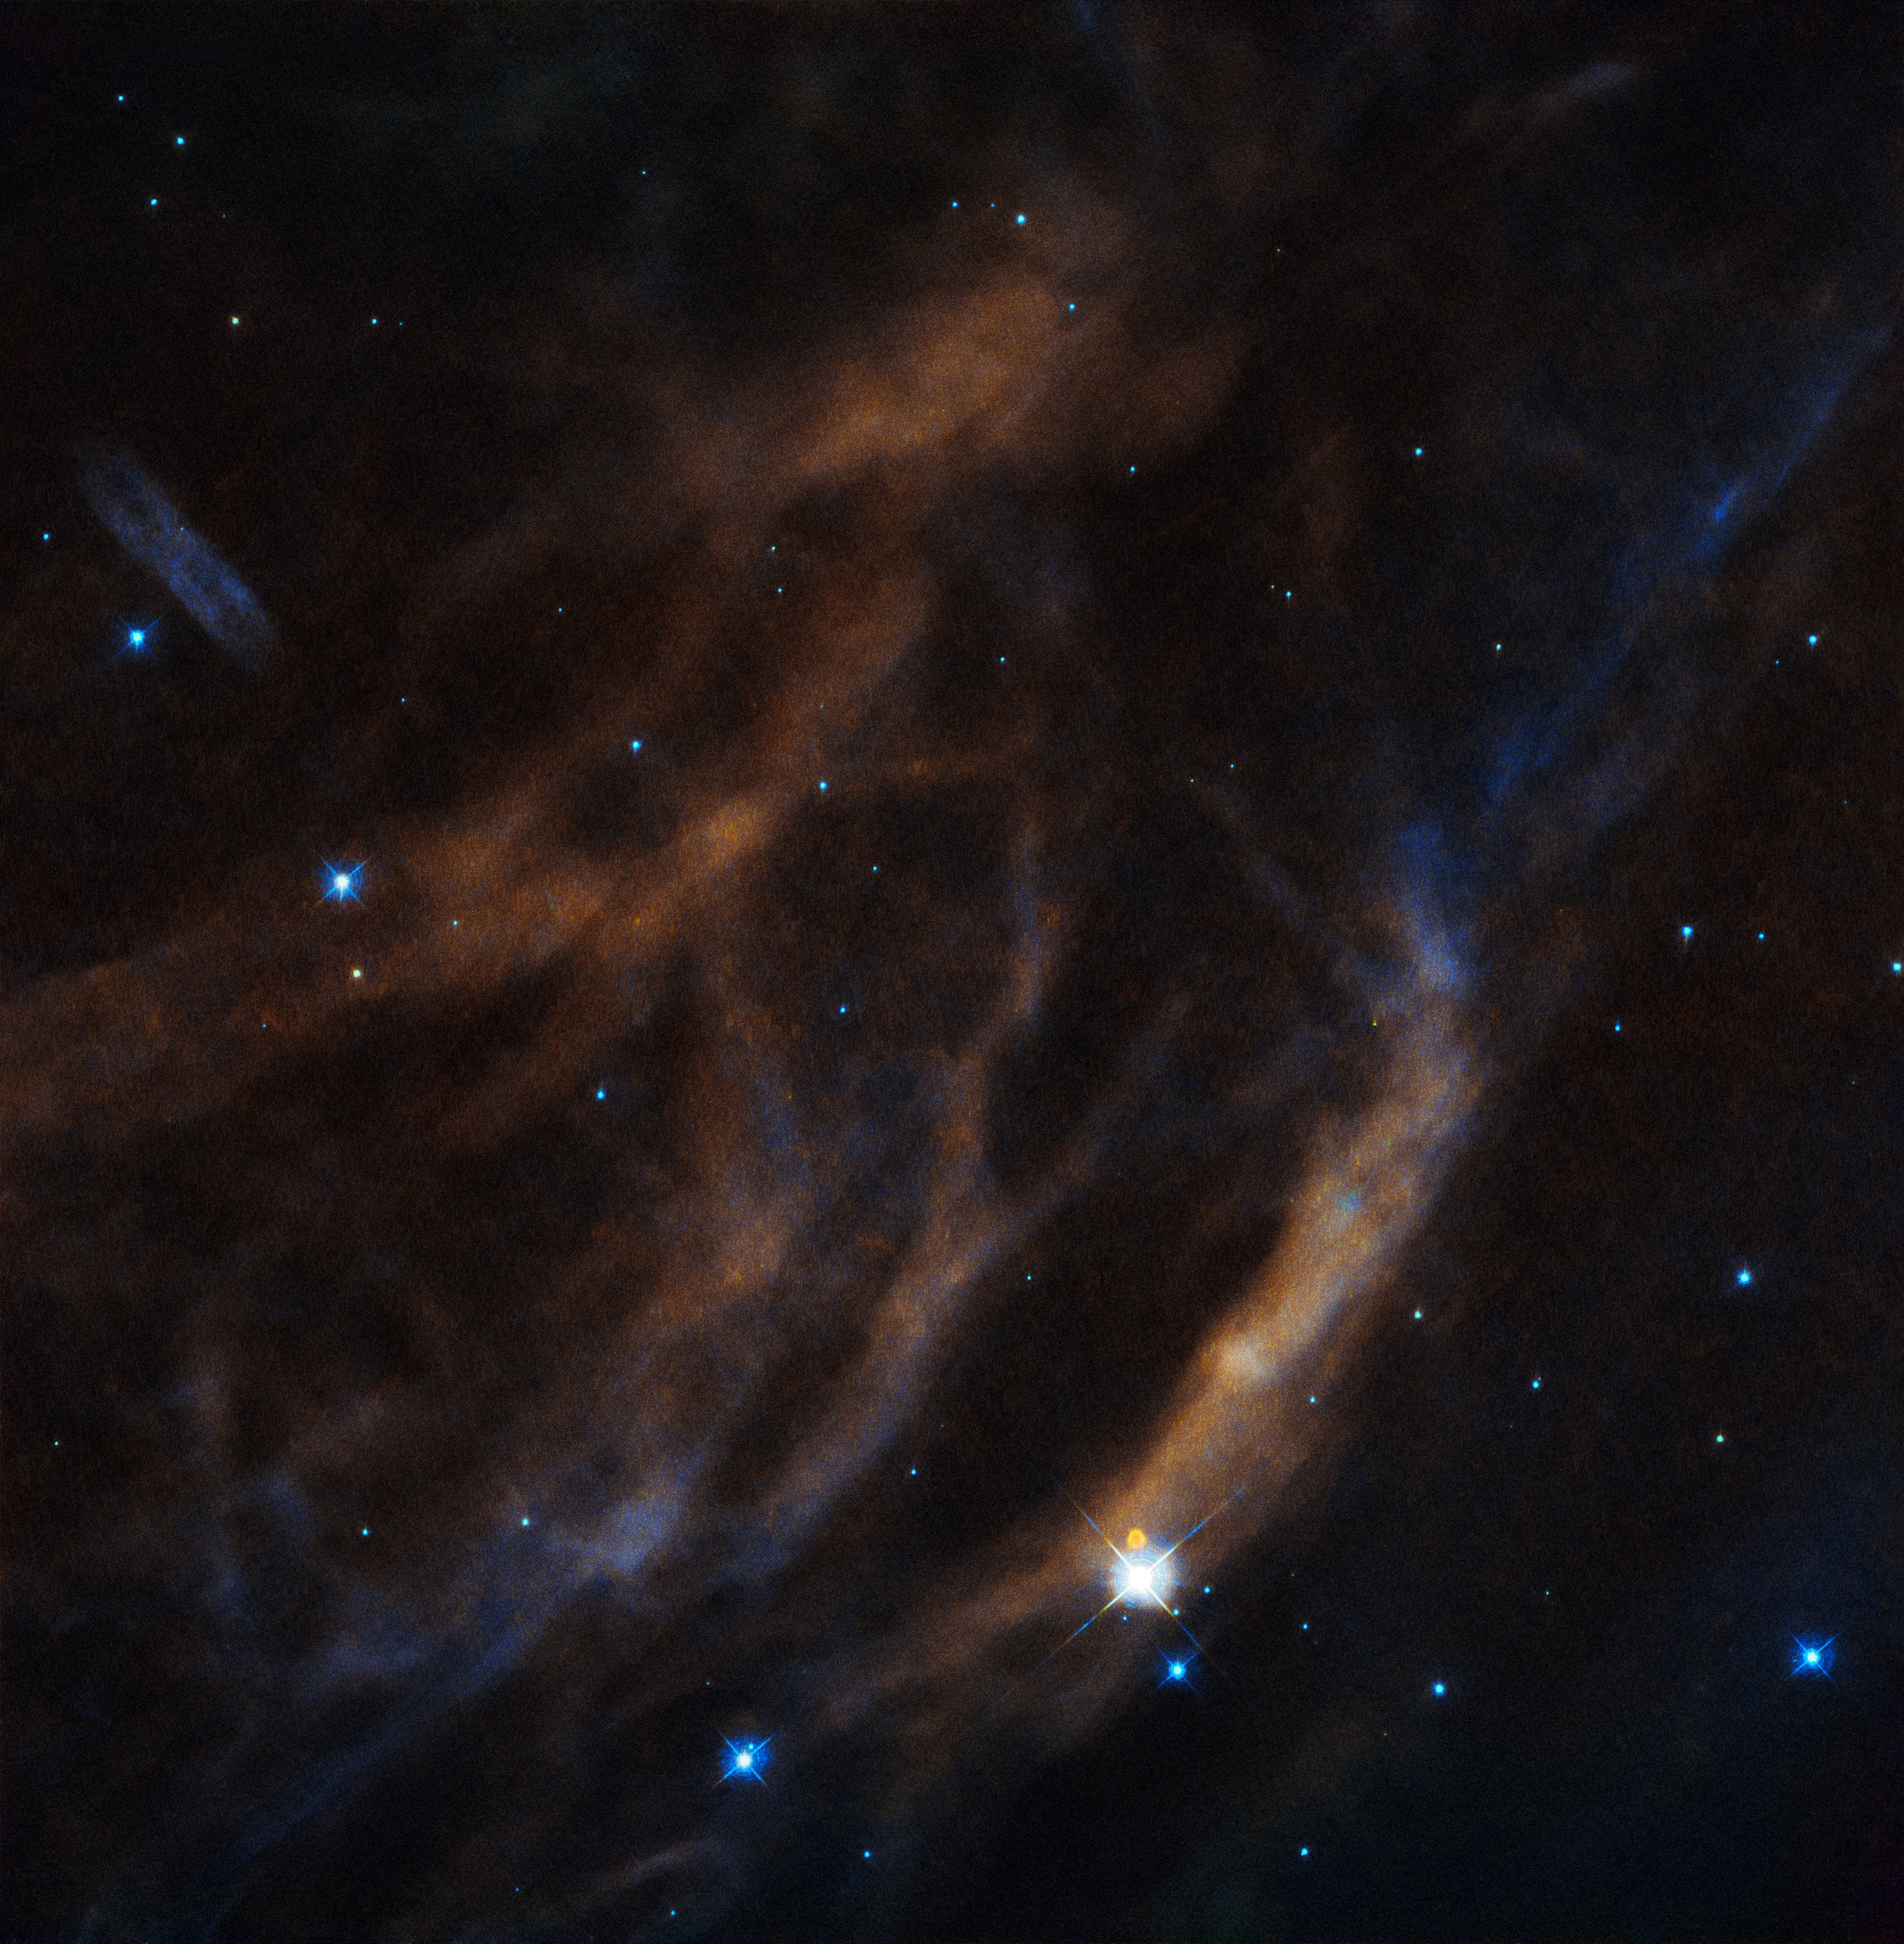

Blowing cosmic bubbles

This entrancing image shows a few of the tenuous threads that comprise Sh2-308, a faint and wispy shell of gas located 5200 light-years away in the constellation of Canis Major (The Great Dog).

Sh2-308 is a large bubble-like structure wrapped around an extremely large, bright type of star known as a Wolf-Rayet Star — this particular star is called EZ Canis Majoris. These type of stars are among the brightest and most massive stars in the Universe, tens of times more massive than our own Sun, and they represent the extremes of stellar evolution. Thick winds continually poured off the progenitors of such stars, flooding their surroundings and draining the outer layers of the Wolf-Rayet stars. The fast wind of a Wolf-Rayet star therefore sweeps up the surrounding material to form bubbles of gas.

EZ Canis Majoris is responsible for creating the bubble of Sh2-308 — the star threw off its outer layers to create the strands visible here. The intense and ongoing radiation from the star pushes the bubble out further and further, blowing it bigger and bigger. Currently the edges of Sh2-308 are some 60 light-years apart!

Beautiful as these cosmic bubbles are, they are fleeting. The same stars that form them will also cause their death, eclipsing and subsuming them in violent supernova explosions.

Credit: ESA/Hubble & NASA